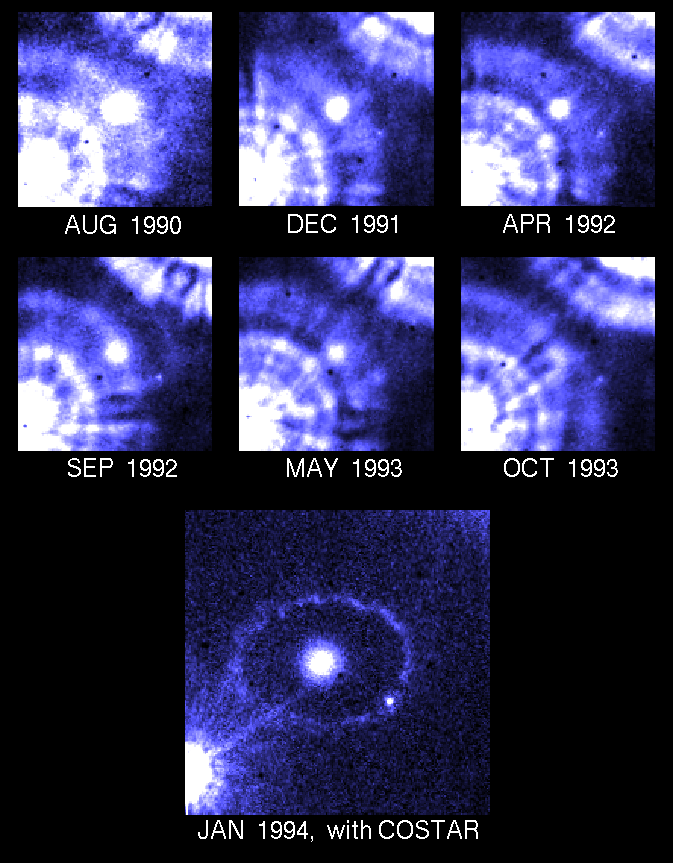

Star evolution

This series of HST images show what is called stellar evolution. Notice the enhancement of the lower image compared to the others. The enhancement is caused by the installation of COSTAR.

Credit: Dra. P. Jakobsen (ESA/STScI), F. Macchetto ESA/STScI). R. Jedrzejewski (STScI), and N. Panagia (ESA/STScI). The April 1992 through October 1993 pre-COSTAR data was provided courtesy of R. Kirshner (CfA) and the SINS Collaboration.